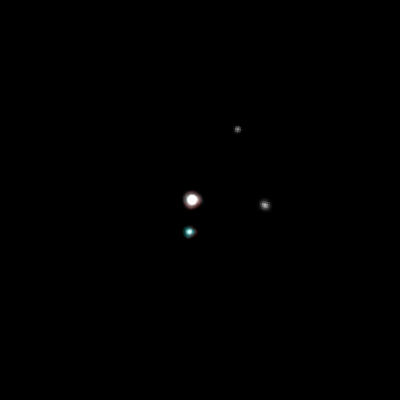

The Pluto system on May 15, 2005

These Hubble Space Telescope images, taken by the Advanced Camera for Surveys, reveal Pluto, its large moon Charon, and the planet's two new candidate satellites.

Credit: NASA, ESA, H. Weaver (JHU/APL), A. Stern (SwRI), and the Hubble Space Telescope Pluto Companion Search Team